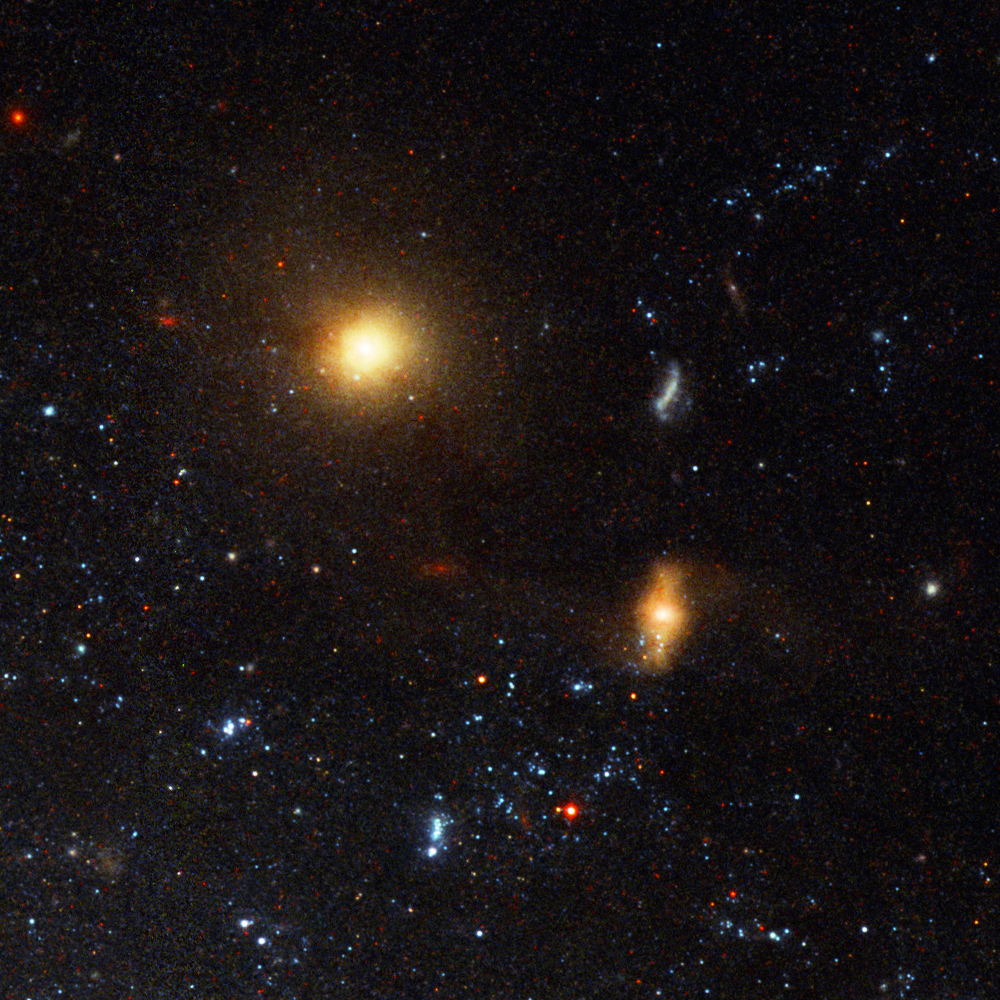

Pinwheel Galaxy close-up 1

Background galaxies far behind the Pinwheel Galaxy. The galaxies are clearly "reddened" by the dust in the Pinwheel.

Credit: Image: European Space Agency & NASA
Acknowledgements:
Project Investigators for the original Hubble data: K.D. Kuntz (GSFC), F. Bresolin (University of Hawaii), J. Trauger (JPL), J. Mould (NOAO), and Y.-H. Chu (University of Illinois, Urbana)
Image processing: Davide De Martin (ESA/Hubble)
CFHT image: Canada-France-Hawaii Telescope/J.-C. Cuillandre/Coelum
NOAO image: George Jacoby, Bruce Bohannan, Mark Hanna/NOAO/AURA/NSF